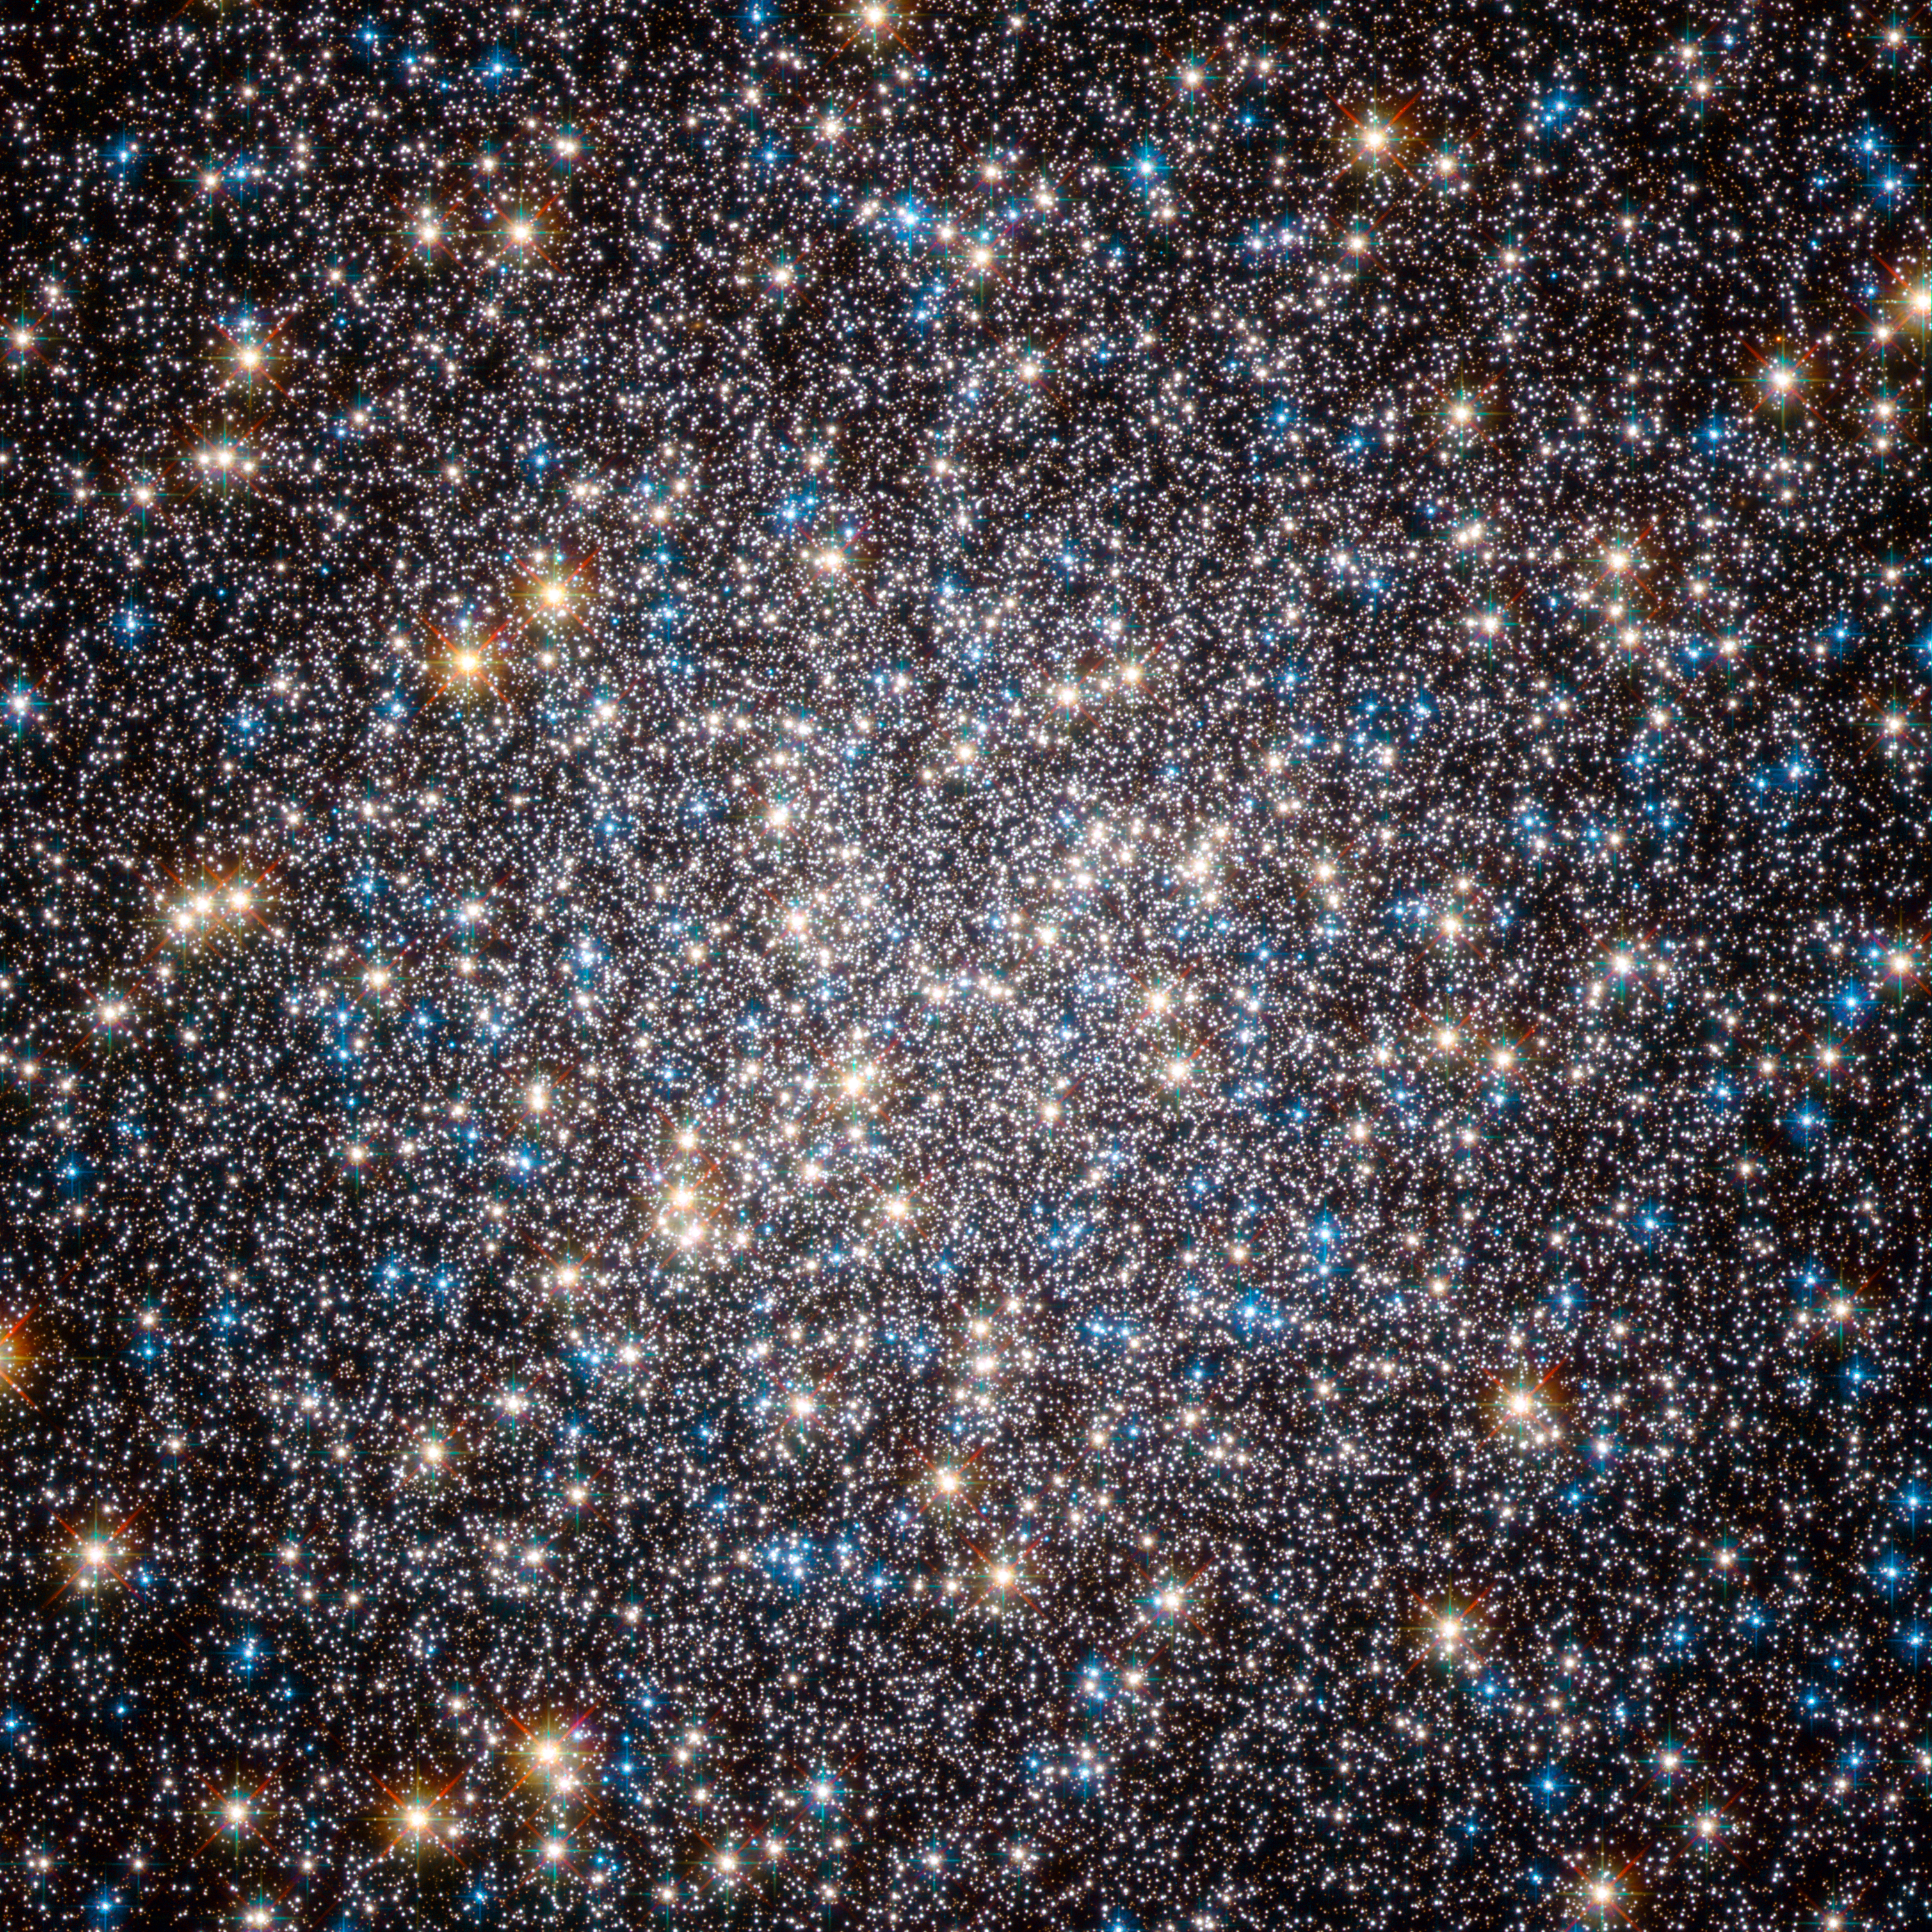

The crowded heart of the Hercules globular cluster

This image, taken by the Advanced Camera for Surveys on the Hubble Space Telescope, shows the core of the great globular cluster Messier 13 and provides an extraordinarily clear view of the hundreds of thousands of stars in the cluster, one of the brightest and best known in the sky. Just 25 000 light-years away and about 145 light-years in diameter, Messier 13 has drawn the eye since its discovery by Edmund Halley, the noted British astronomer, in 1714. The cluster lies in the constellation of Hercules and is so bright that under the right conditions it is even visible to the unaided eye. As Halley wrote: “This is but a little Patch, but it shews it self to the naked Eye, when the Sky is serene and the Moon absent.” Messier 13 was the target of a symbolic Arecibo radio telescope message that was sent in 1974, communicating humanity’s existence to possible extraterrestrial intelligences. However, more recent studies suggest that planets are very rare in the dense environments of globular clusters.

Messier 13 has also appeared in literature. In his 1959 novel, The Sirens of Titan, Kurt Vonnegut wrote “Every passing hour brings the Solar System forty-three thousand miles closer to Globular Cluster M13 in Hercules — and still there are some misfits who insist that there is no such thing as progress.” The step from Halley’s early telescopic view to this Hubble image indicates some measure of the progress in astronomy in the last three hundred years.

This picture was created from images taken with the Wide Field Channel of the Advanced Camera for Surveys on the Hubble Space Telescope. Data through a blue filter (F435W) are coloured blue, data through a red filter (F625W) are coloured green and near-infrared data (through the F814W filter) are coloured red. The exposure times are 1480 s, 380 s and 567 s respectively and the field of view is about 2.5 arcminutes across.

Credit: ESA/Hubble and NASA